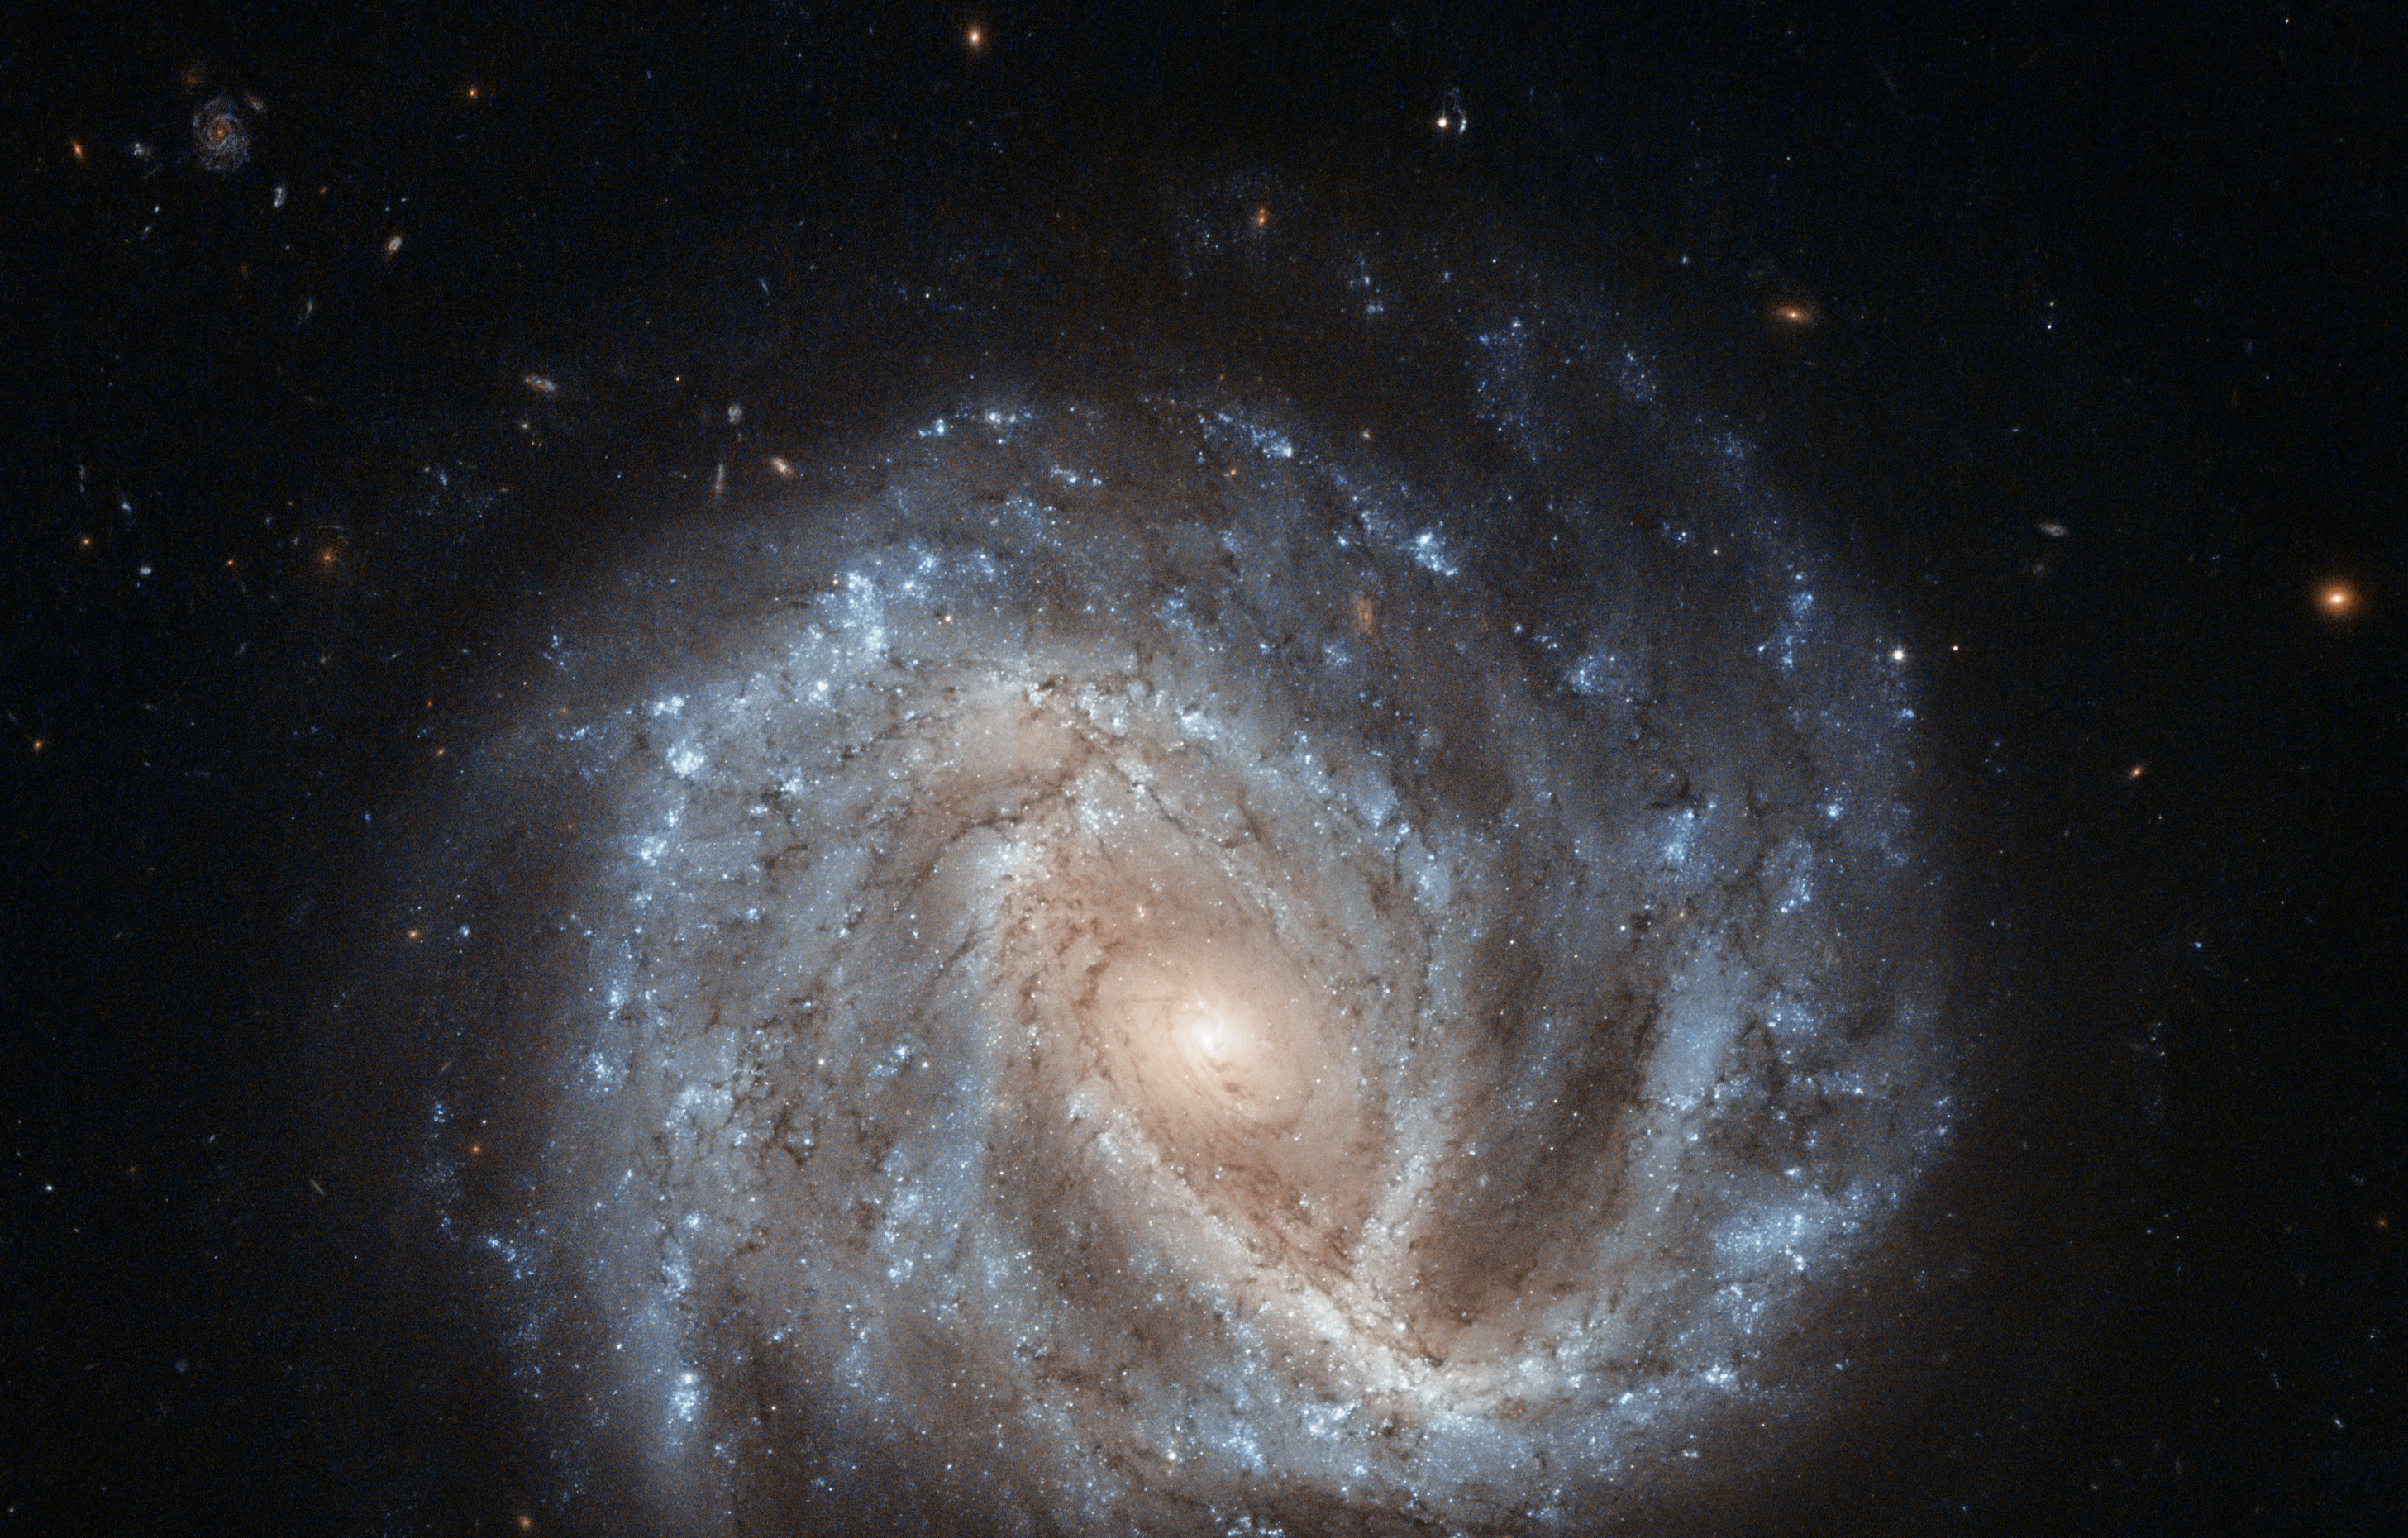

A curious supernova in NGC 2441

This bright spiral galaxy is known as NGC 2441, located in the northern constellation of Camelopardalis (The Giraffe). However, NGC 2441 is not the only subject of this new Hubble image; the galaxy contains an intriguing supernova named SN1995E, visible as a small dot at the approximate centre of this image. For a labelled view, see potw1425b.

Supernova SN1995E, discovered in 1995 as its name suggests is a type Ia supernova. This kind of supernova is found in binary systems, where one star — a white dwarf — drags matter from its orbiting companion until it becomes unstable and explodes violently. White dwarf stars all become unbalanced once they reach the same mass, meaning that they all form supernovae with the same intrinsic brightness. Because of this, they are used as standard candles to measure distances in the Universe.

But SN1995E may be useful in another way. More recent observations of this supernova have suggested that it may display a phenomenon known as a light echo, where light is scattered and deflected by dust along our line of sight, making it appear to “echo” outwards from the source. In 2006, Hubble observed SN1995E to be fading in a way that suggested its light was being scattered by a surrounding spherical shell of dust. These echoes can be used to probe both the environments around cosmic objects like supernovae, and the characteristics of their progenitor stars. If SN1995E does indeed have a light echo, it would belong to a very elite club; only two other type Ia supernovae have been found to display light echoes (SN1991T and SN1998bu).

NGC 2441 was first seen by Wilhelm Tempel in 1882, a German astronomer with a keen eye for comets. In total, Tempel observed and documented some 21 comets, several of which were named after him.

A version of this image was entered into the Hubble’s Hidden Treasures image processing competition by contestant Nick Rose.

Credit: ESA/Hubble & NASA Acknowledgement: Nick Rose